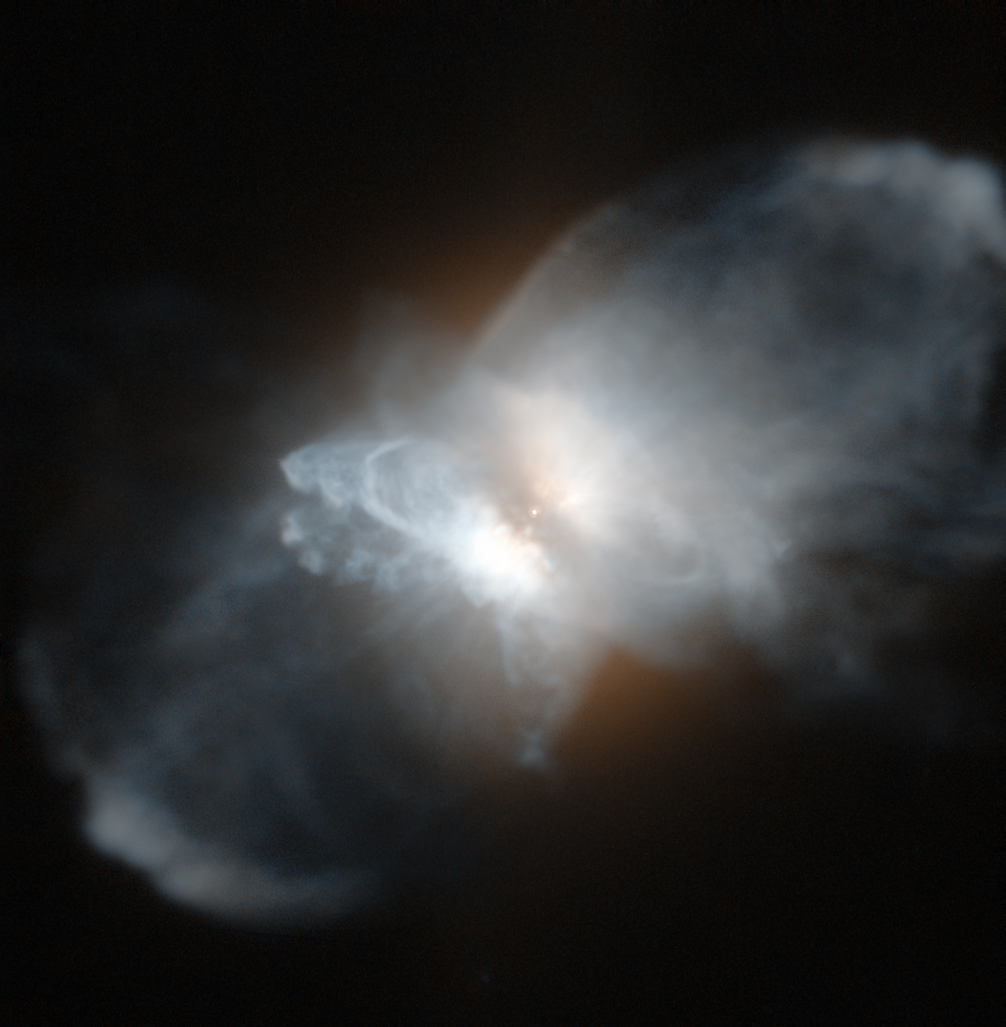

The frosty Leo Nebula

Three thousand light-years from Earth lies the strange protoplanetary nebula IRAS 09371+1212, nicknamed the Frosty Leo Nebula. Despite their name, protoplanetary nebulae have nothing to do with planets: they are formed from material shed from their aging central star. The Frosty Leo Nebula has acquired its curious name as it has been found to be rich in water in the form of ice grains, and because it lies in the constellation of Leo.

This nebula is particularly noteworthy because it has formed far from the galactic plane, away from interstellar clouds that may block our view. The intricate shape comprises a spherical halo, a disc around the central star, lobes and gigantic loops. This complex structure strongly suggests that the formation processes are complex and it has been suggested that there could be a second star, currently unseen, contributing to the shaping of the nebula.

Protoplanetary nebulae like the Frosty Leo Nebula have brief lifespans by astronomical standards and are precursors to the planetary nebula phase, in which radiation from the star will make the nebula’s gas light up brightly. Their rarity makes studying them a priority for astronomers who seek to understand better the evolution of stars.

This picture was created from images taken with the High Resolution Channel of Hubble’s Advanced Camera for Surveys, which images a small area of sky (only 26 by 29 arcseconds) in high detail.

Credit: ESA/Hubble & NASA